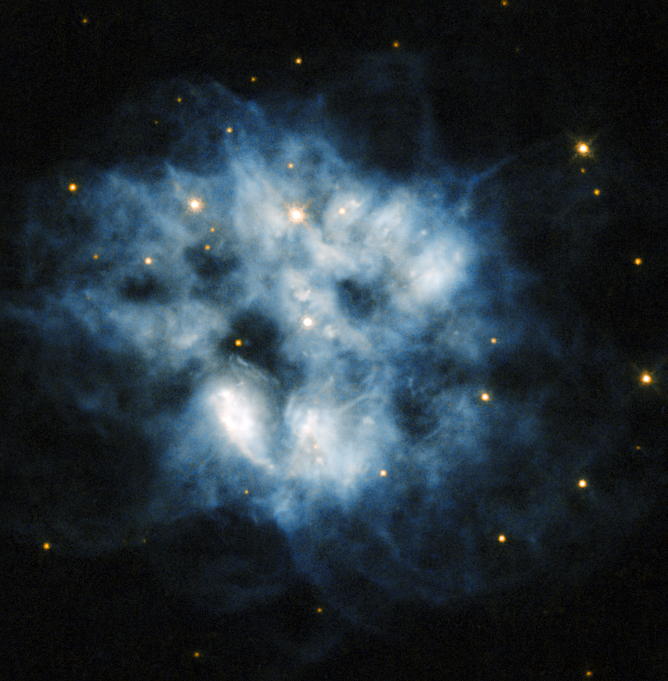

A pulsating stellar relic

This NASA/ESA Hubble Space Telescope image shows the planetary nebula NGC 2452, located in the southern constellation of Puppis. The blue haze across the frame is what remains of a star like our Sun after it has depleted all its fuel. When this happens, the core of the star becomes unstable and releases huge numbers of incredibly energetic particles that blow the star's atmosphere away into space.

At the centre of this blue cloud lies what remains of the nebula's progenitor star. This cool, dim, and extremely dense star is actually a pulsating white dwarf, meaning that its brightness varies over time as gravity causes waves that pulse throughout the small star's body.

NGC 2452 was discovered by Sir John Herschel in 1847. He initially defined it as "an object whose nature I cannot make out. It is certainly not a star, nor a close double star [...] I should call it an oblong planetary nebula". To early observers like Herschel with their smaller telescopes, planetary nebulae resembled gaseous planets, and so were named accordingly. The name has stuck, although modern telescopes like Hubble have made it clear that these objects are not planets at all, but the outer layers of dying stars being thrown off into space.

A version of this image was entered into the Hubble's Hidden Treasures image processing competition by contestants Luca Limatola and Budeanu Cosmin Mirel.

Credit: ESA/Hubble & NASA Acknowledgements: Luca Limatola, Budeanu Cosmin Mirel